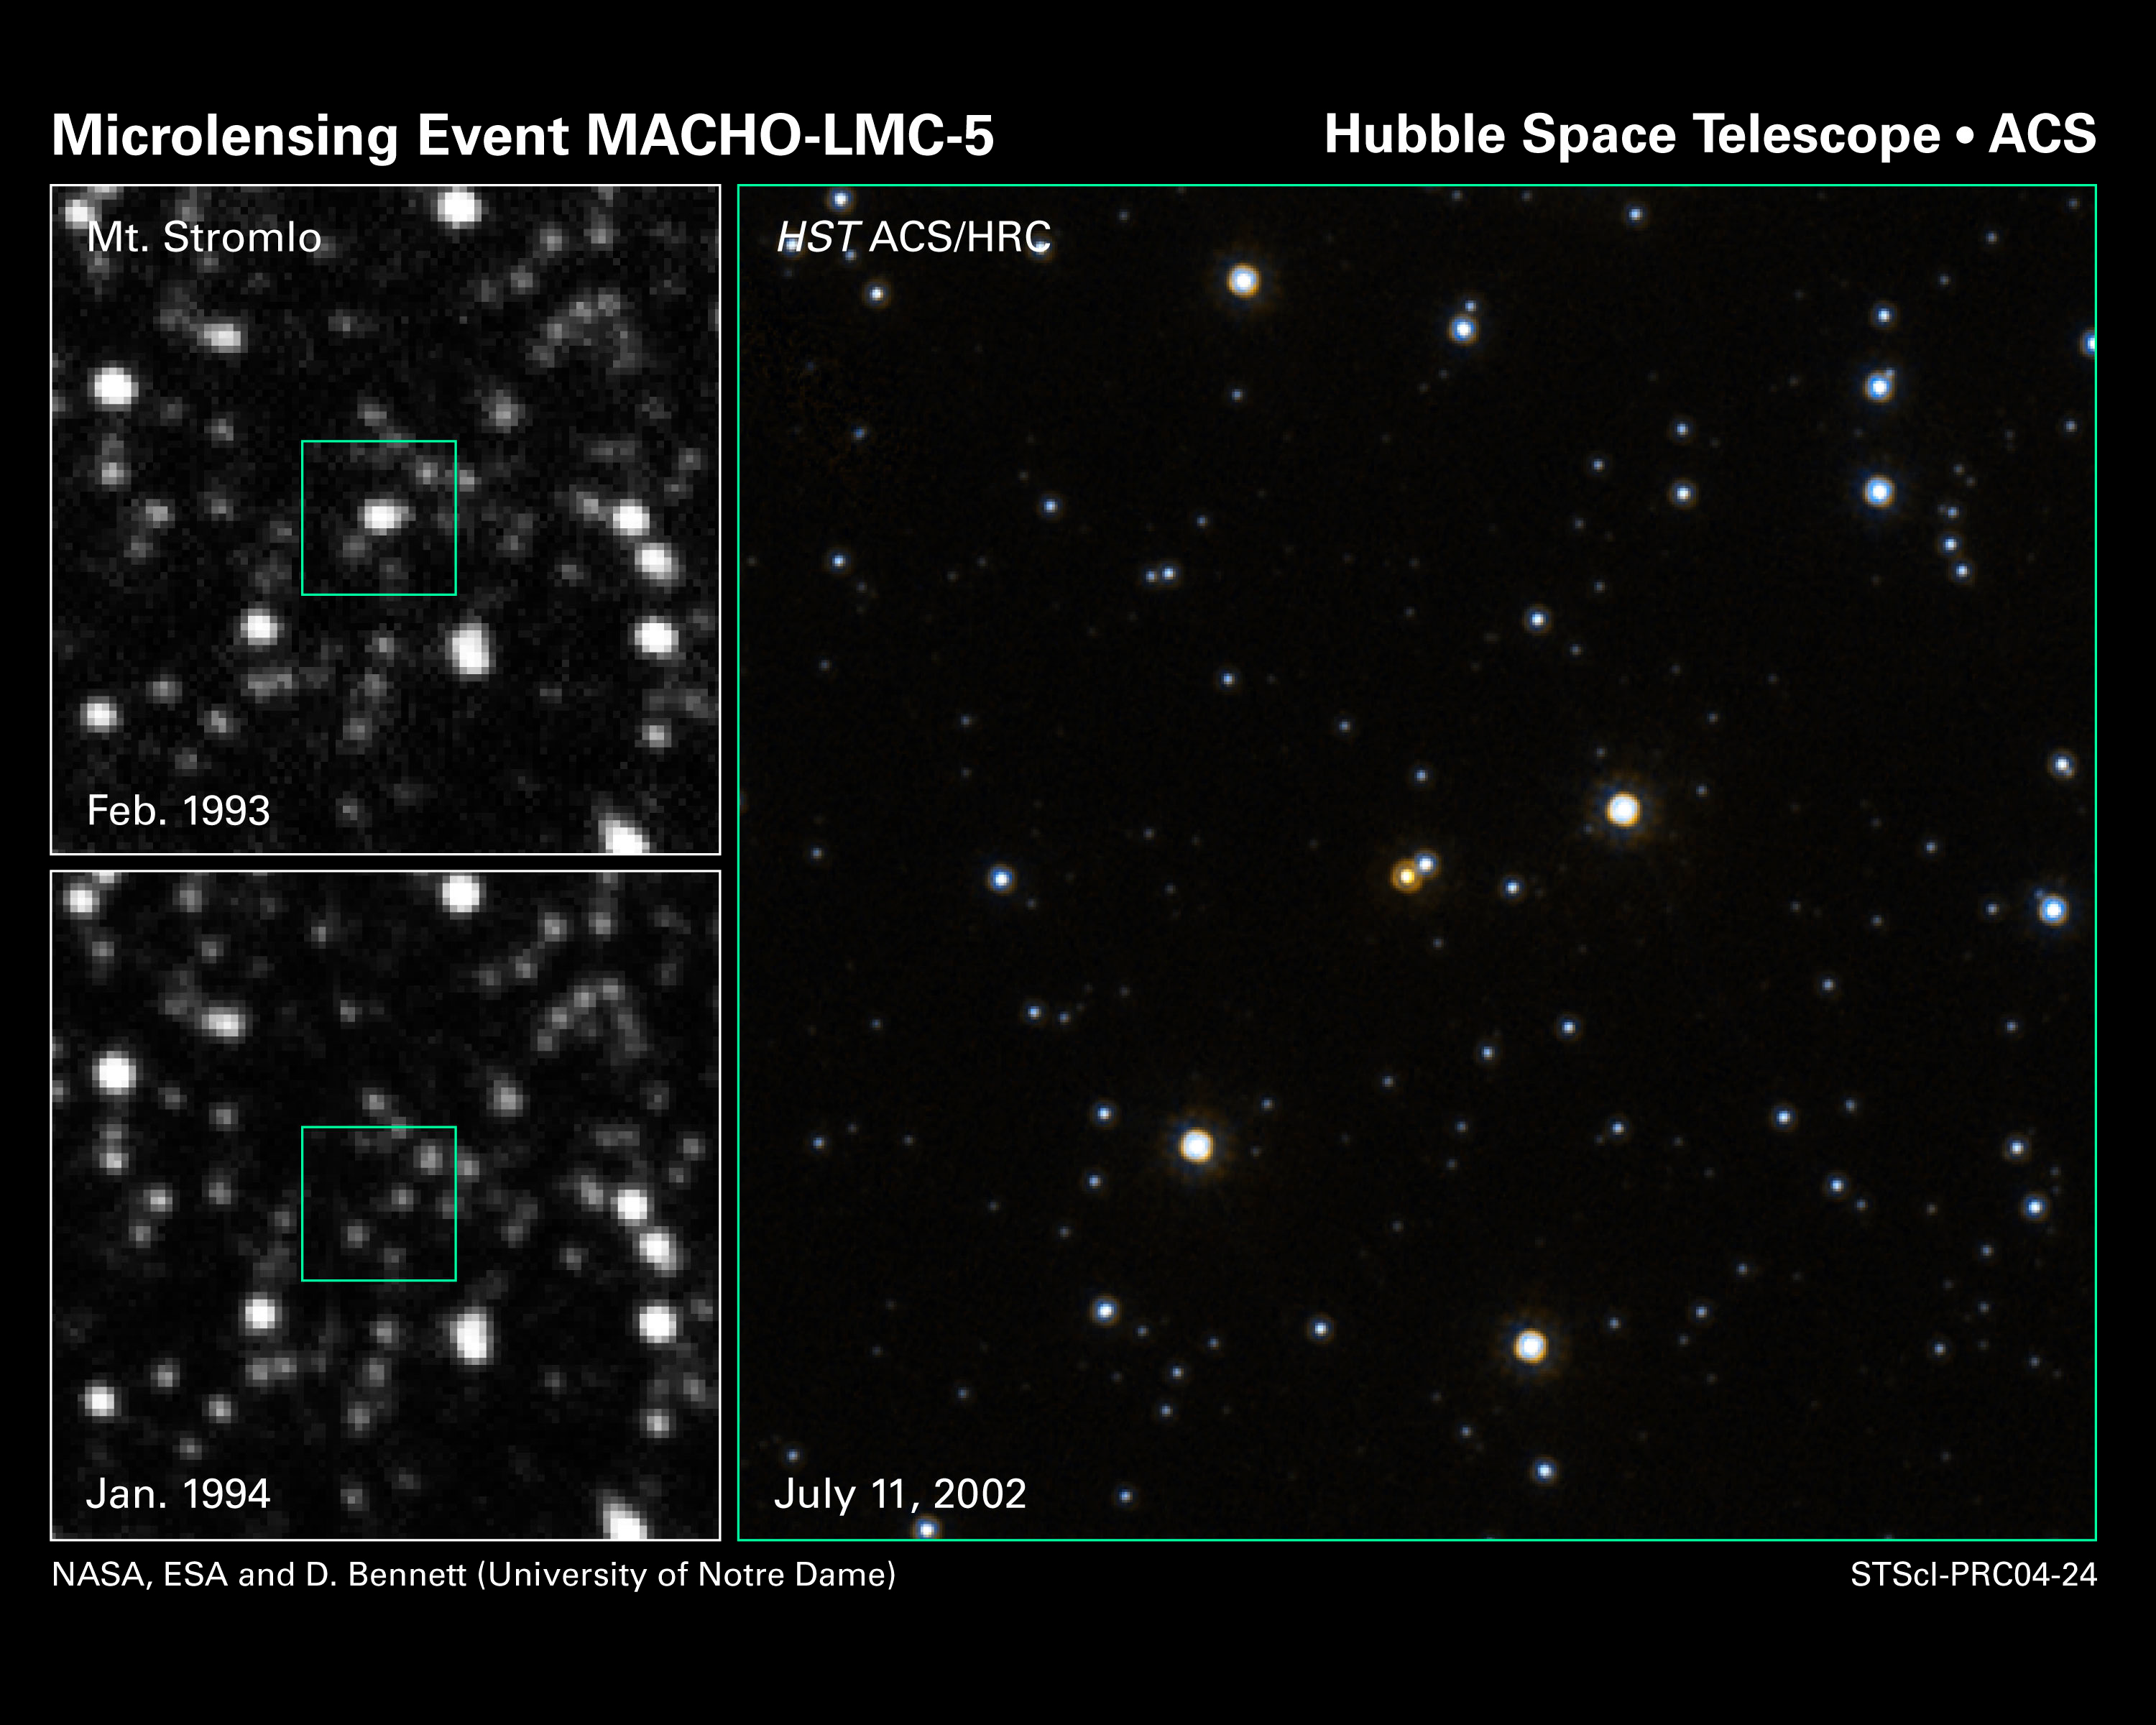

Measuring the mass of a single star

In the image at top, left, astronomers discovered a subtle brightening of a star [located within the box] due to the effect of gravitational microlensing. This phenomenon occurs when a foreground star, in this case a dim red star, passes in front of a much more distant star and amplifies its light. Astronomers were engaged in a large-scale search for microlensing events in the halo of our Milky Way galaxy. They were looking in the direction of the Large Magellanic Cloud, a satellite galaxy of our Milky Way. The image was taken in February 1993 with the 50-inch telescope at the Mount Stromlo Observatory in Australia. The box represents the field of view of NASA/ESA Hubble Space Telescope.

Credit: NASA, ESA and D. Bennett (University of Notre Dame)